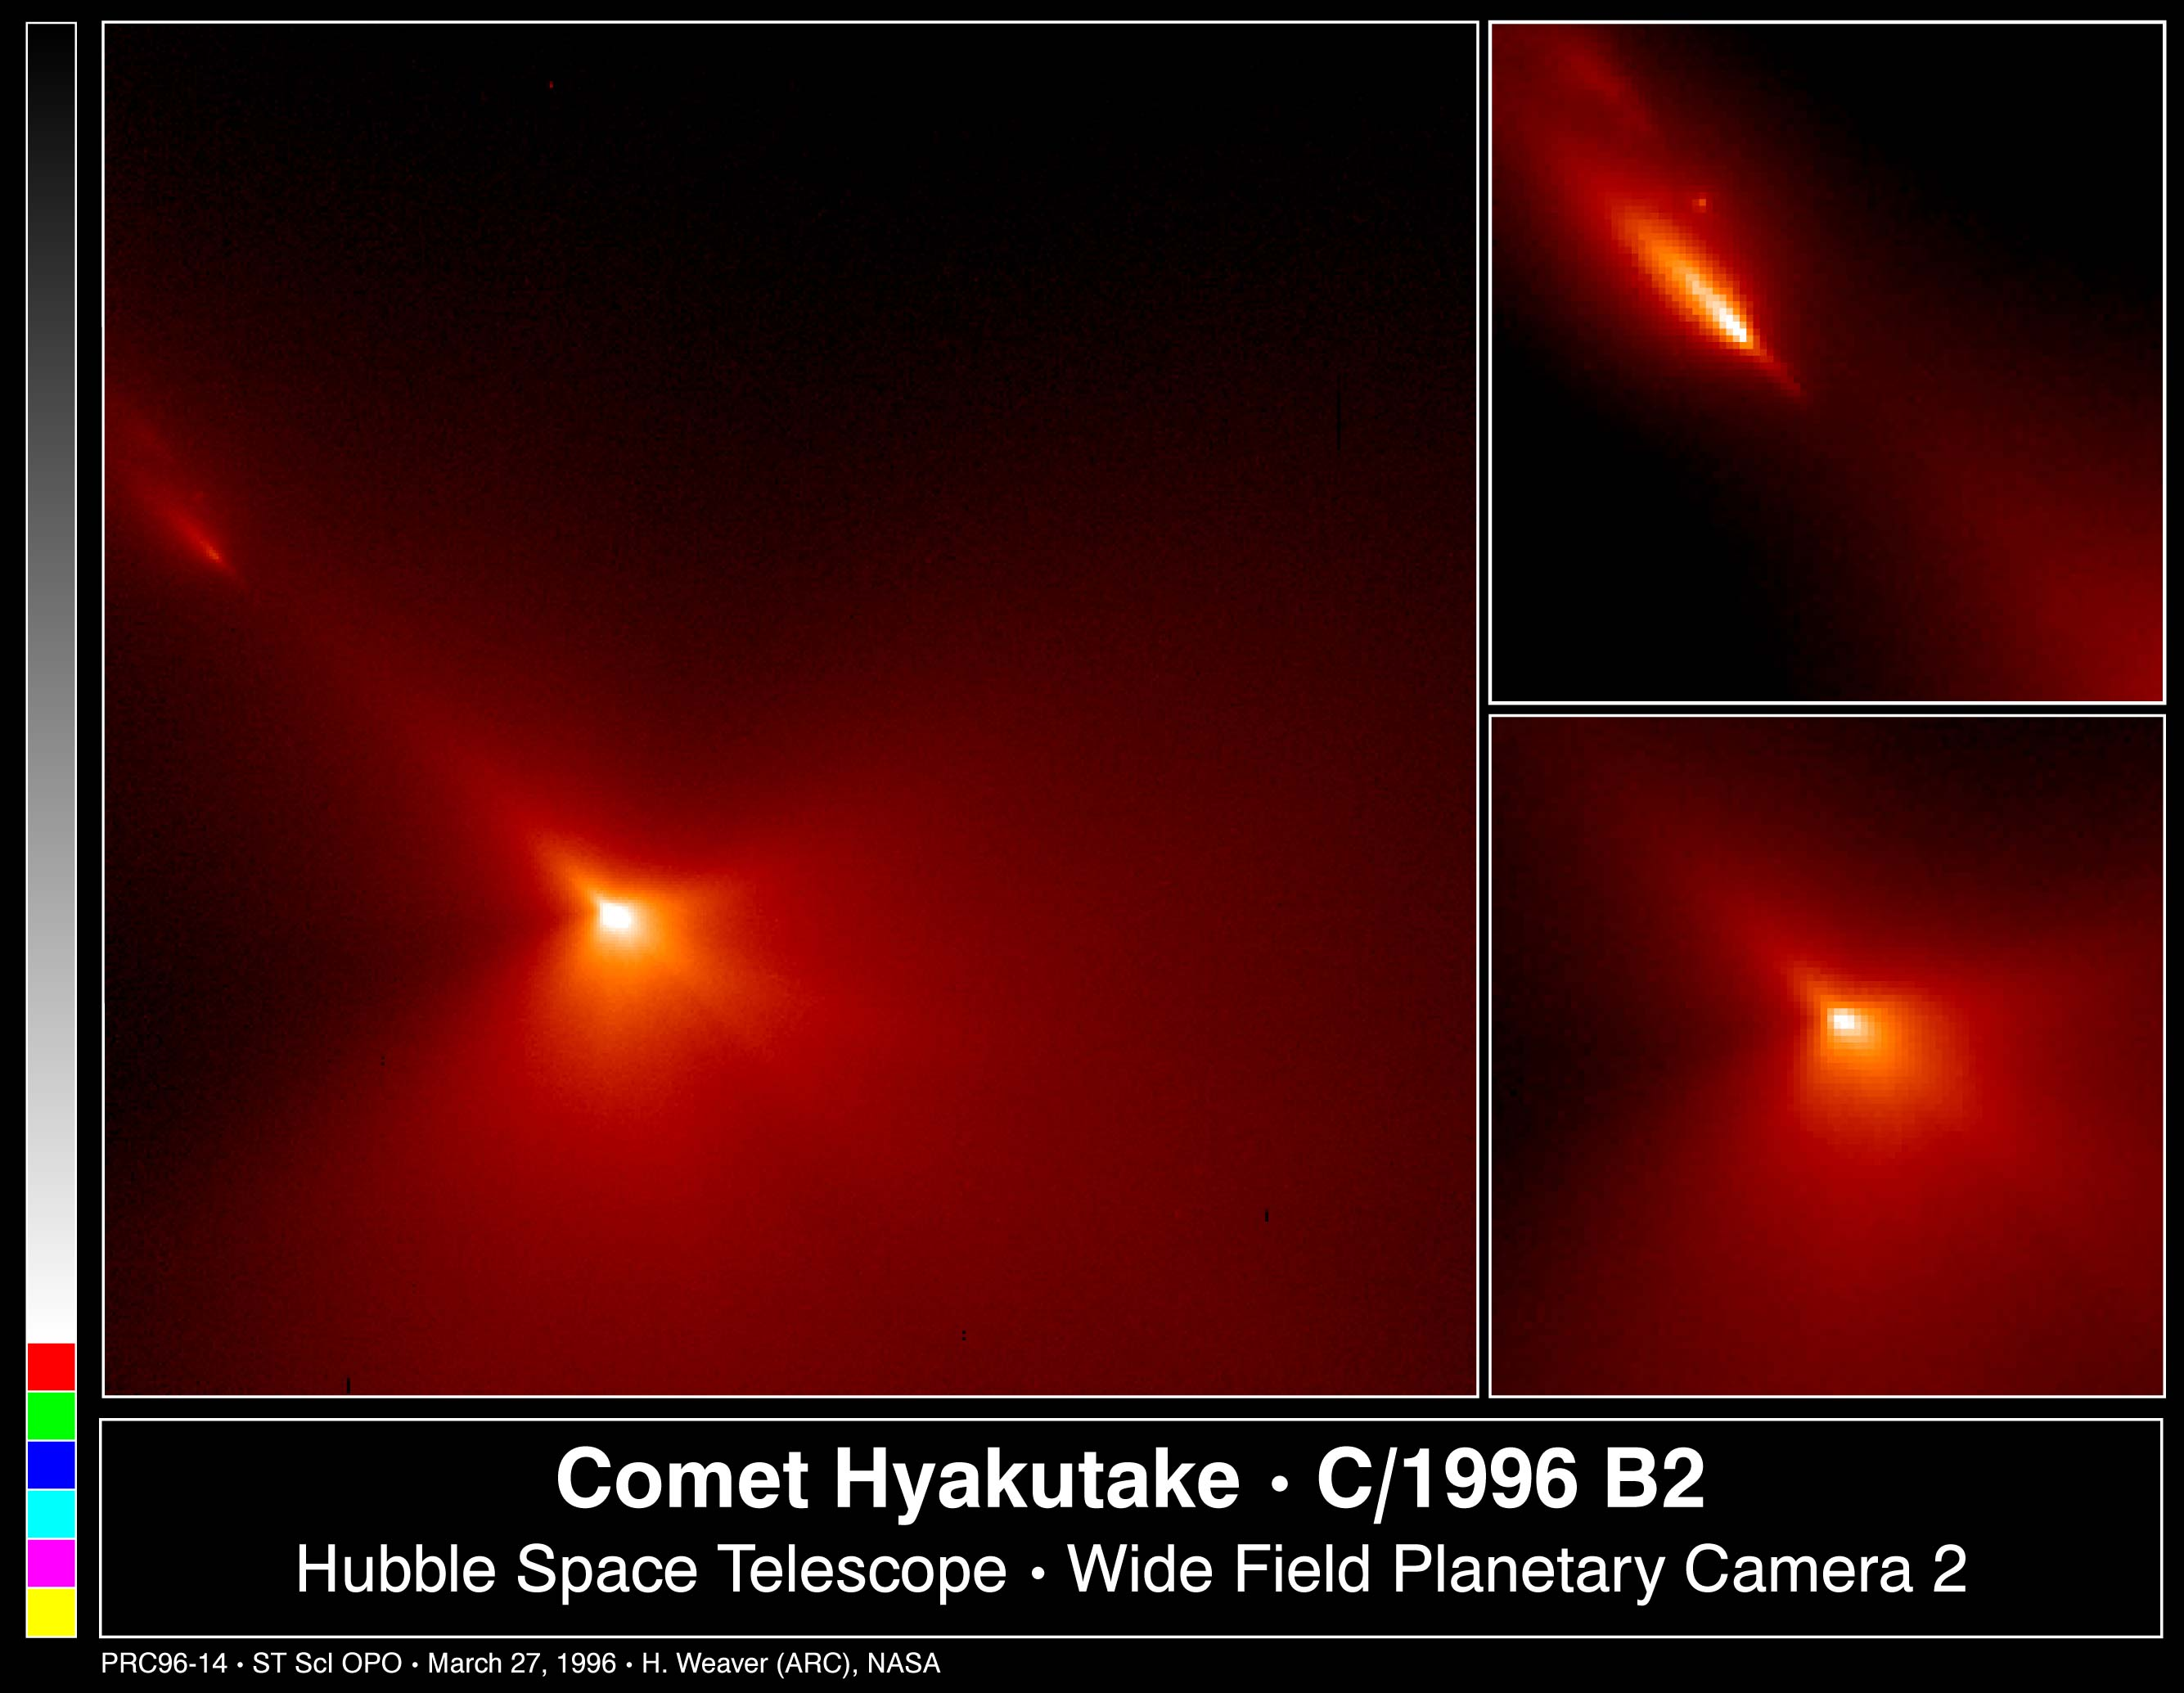

Inner Region of Comet Hyakutake

These are Hubble Space Telescope images of comet Hyakutake (designated C/1996 B2), taken at 8:30 P.M.. EST on Monday, March 25 when the comet passed at a distance of only 9.3 million miles (about 15 million kilometres) from Earth.

Credit: H. A. Weaver (Applied Research Corp.), HST Comet Hyakutake Observing Team, and NASA/ESA